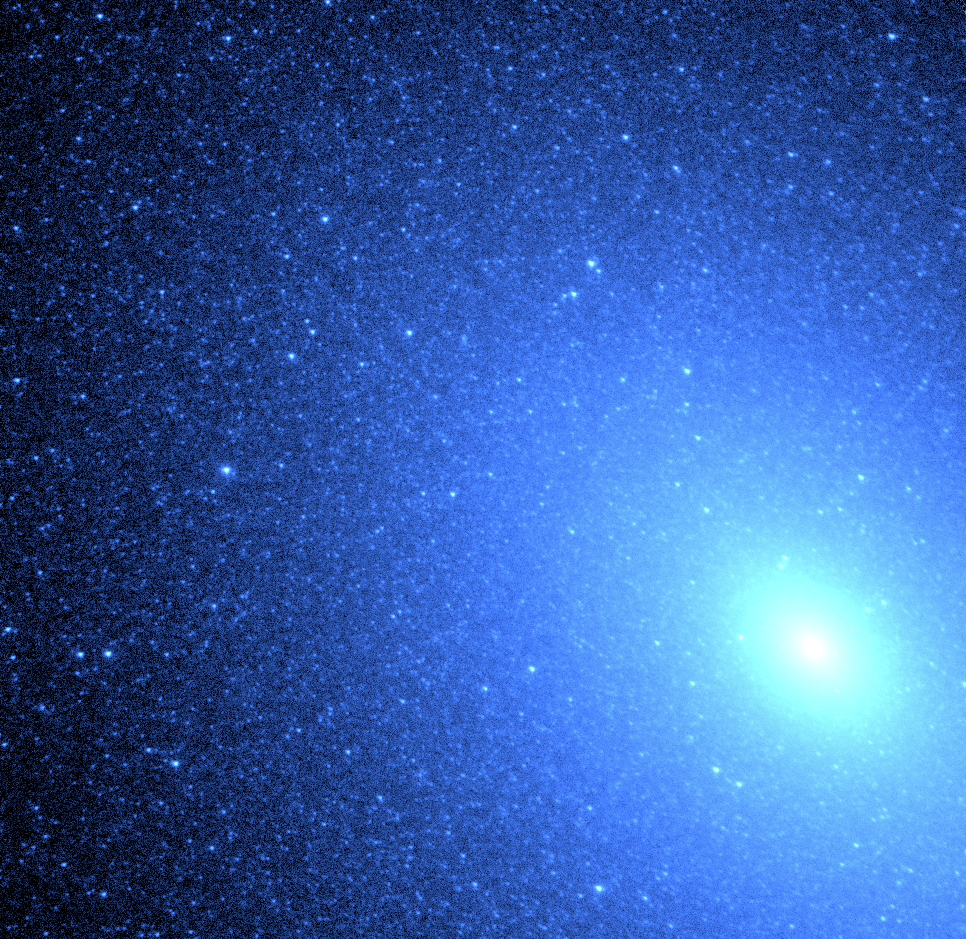

Hubble identifies source of ultraviolet light in an old nebula

Hubble Space Telescope's exquisite resolution has allowed astronomers to resolve, for the first time, hot blue stars deep inside an elliptical galaxy. The swarm of nearly 8, 000 blue stars resembles a blizzard of snowflakes near the core (lower right) of the neighboring galaxy M 32, located 2.5 million light-years away in the constellation Andromeda.

Credit: NASA/ESA and Thomas M. Brown, Charles W. Bowers, Randy A. Kimble, AllenV. Sweigart (NASA/ESA Goddard Space Flight Center) and Henry C. Ferguson ( Space Telescope Science Institute)